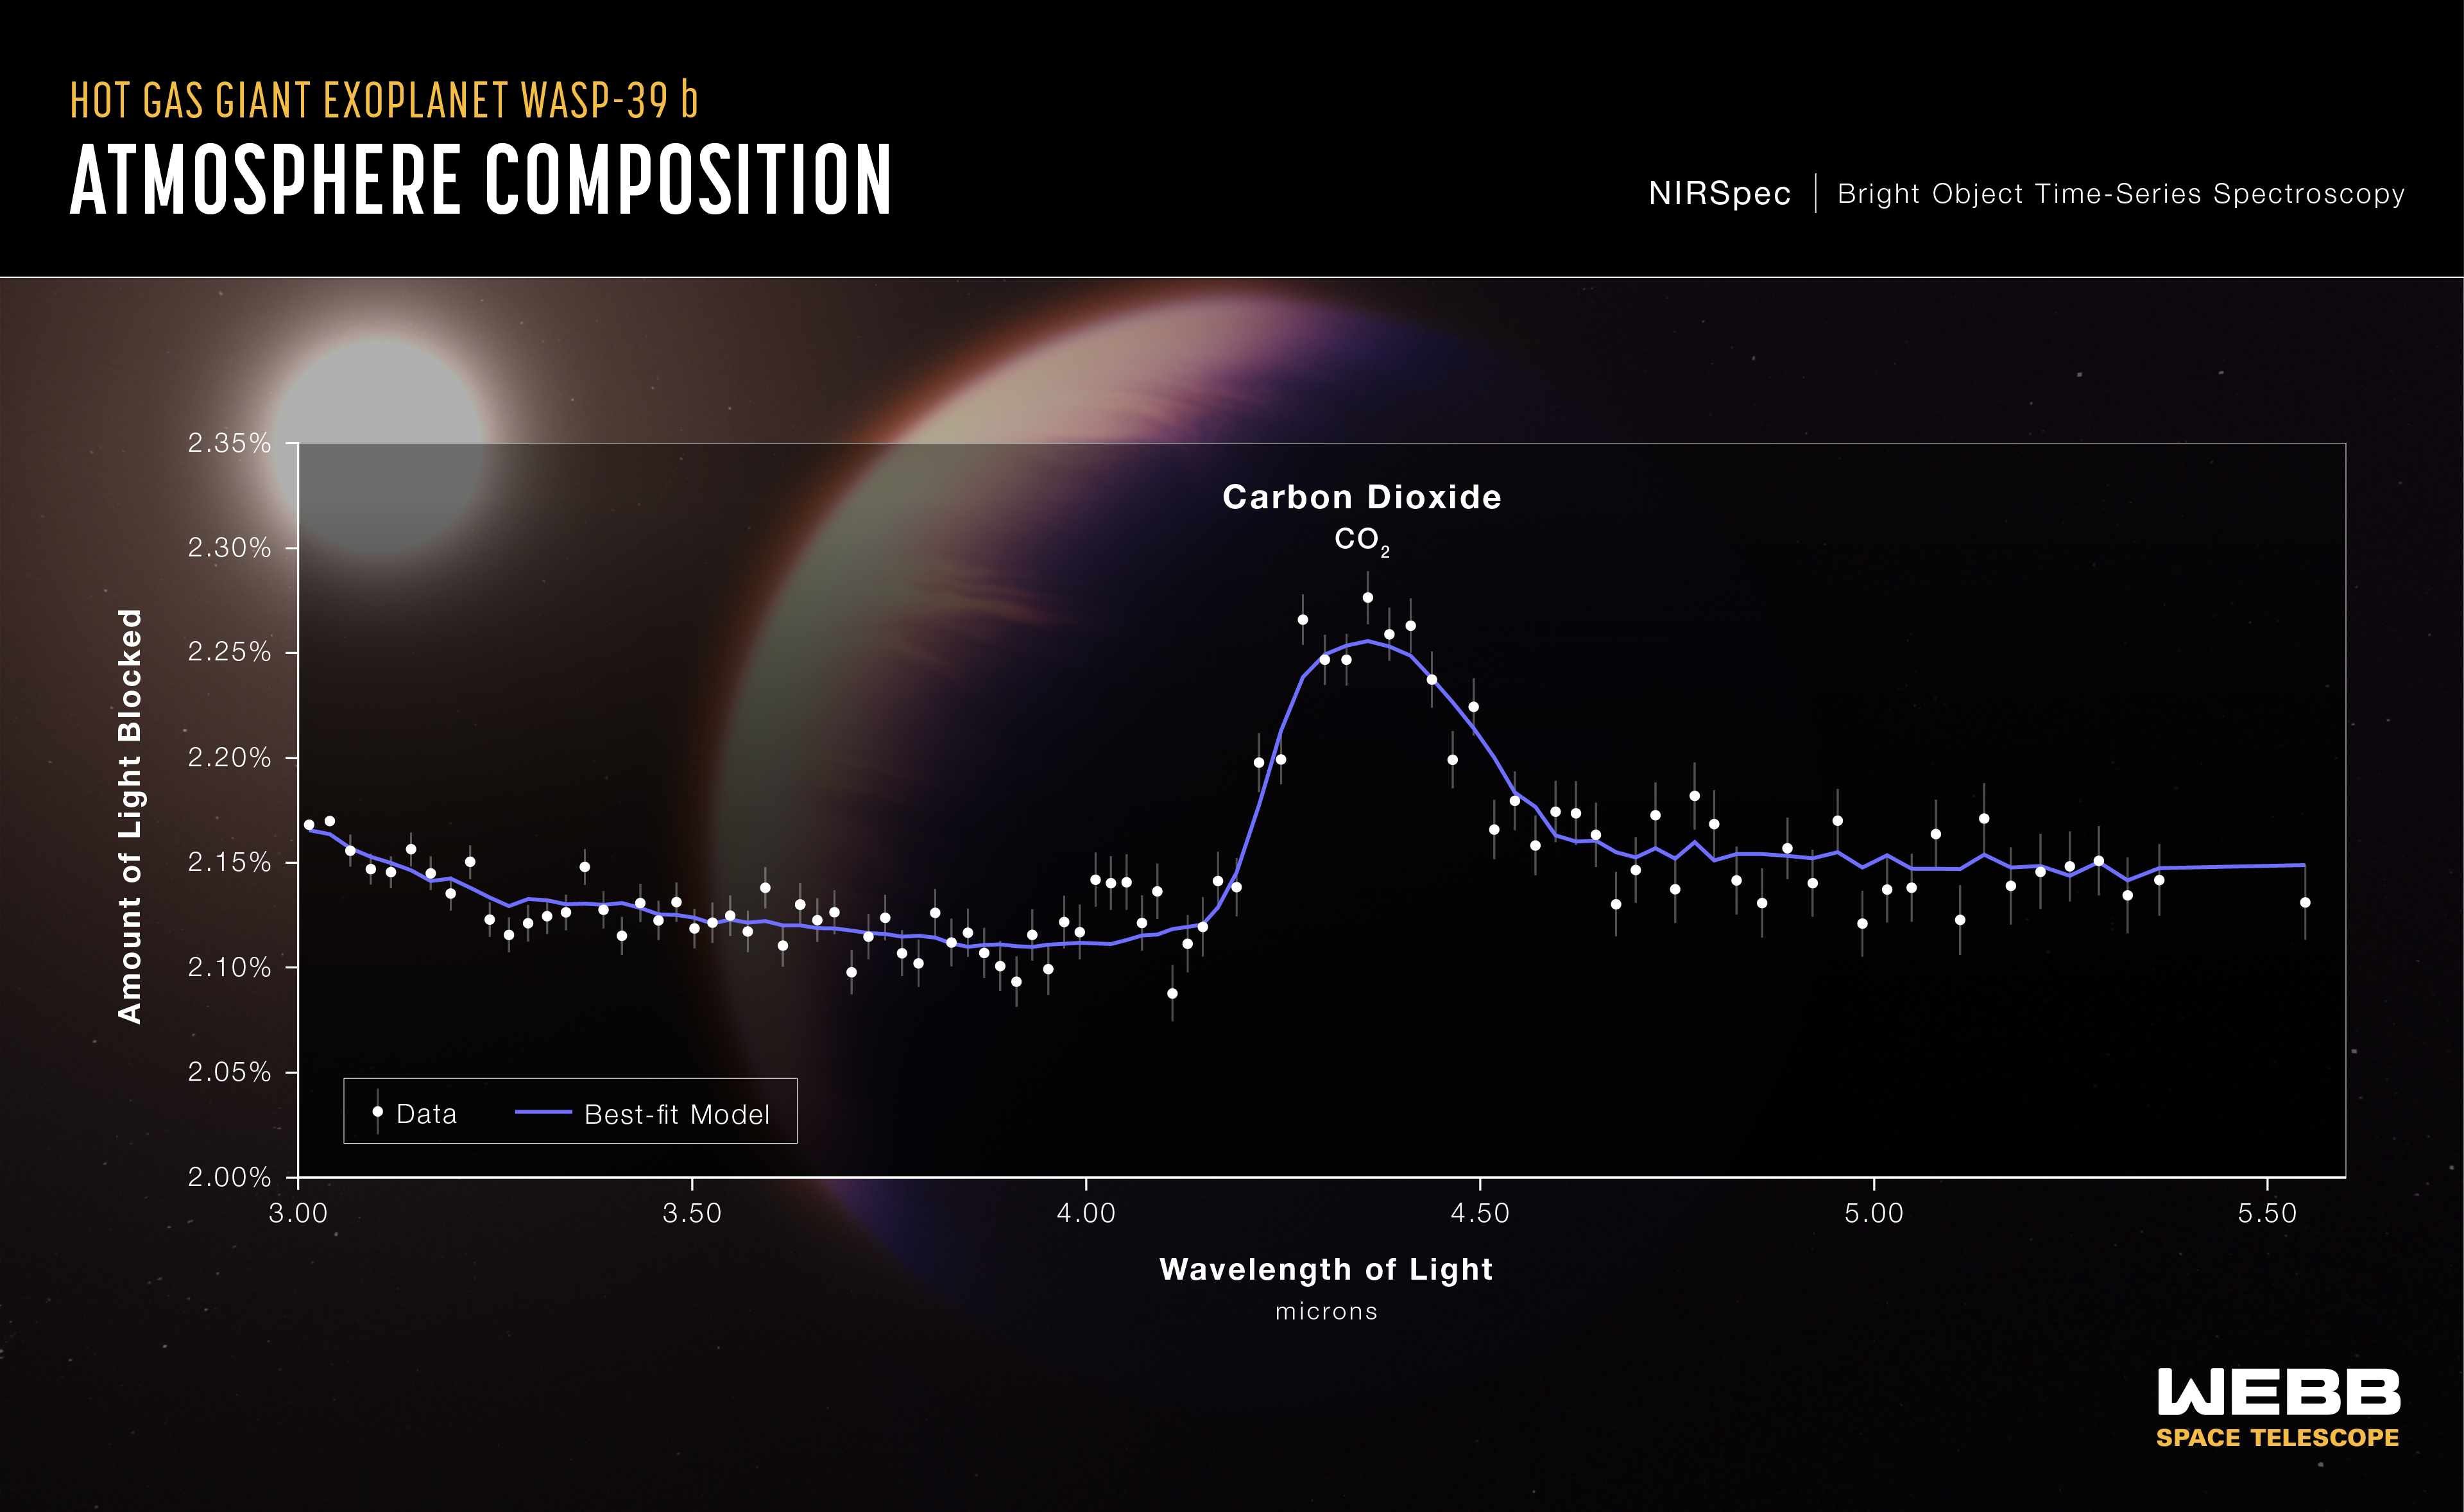

Hot Gas Giant Exoplanet WASP-39 b (NIRSpec Transmission Spectrum)

A transmission spectrum of the hot gas giant exoplanet WASP-39 b, captured by Webb’s Near-Infrared Spectrograph (NIRSpec) on 10 July 10 2022, reveals the first definitive evidence for carbon dioxide in the atmosphere of a planet outside the Solar System. This is the first detailed transmission spectrum ever captured that covers wavelengths between 3 and 5.5 microns.

A transmission spectrum is made by comparing starlight filtered through a planet’s atmosphere as it moves in front of the star, to the unfiltered starlight detected when the planet is beside the star. Each of the 95 data points (white circles) on this graph represents the amount of a specific wavelength of light that is blocked by the planet and absorbed by its atmosphere.

This spectrum was made by measuring the change in brightness of each wavelength over time as the planet transited its star. The planet’s atmosphere absorbs some wavelengths more than others. Wavelengths absorbed by the atmosphere appear as peaks in the transmission spectrum. The hill centred around 4.3 microns represents the light absorbed by carbon dioxide.

The grey lines extending above and below each data point are error bars that show the uncertainty of each measurement, or the reasonable range of possible values. For a single observation, the error on these measurements is extremely small.

The blue line is a best-fit model that takes into account the data, the known properties of WASP-39 b and its star (e.g., size, mass, temperature), and the assumed characteristics of the atmosphere. Researchers can vary the parameters in the model — changing unknown characteristics like cloud height in the atmosphere and abundances of various gases — to get a better fit and further understand what the atmosphere is really like. The model shown here assumes that the planet is made primarily of hydrogen and helium with small amounts of water and carbon dioxide, with a thin veil of clouds.

The observation was made using the NIRSpec PRISM bright object time-series mode, which involves using a prism to spread out light from a single bright object (like the star WASP-39) and measuring the brightness of each wavelength at set intervals of time.

WASP-39 b is a hot gas giant exoplanet that orbits a Sun-like star roughly 700 light-years away, in the constellation Virgo. The planet orbits extremely close to its star (less than 1/20 of the distance between Earth and the Sun) and completes one orbit in just over four Earth-days. The planet’s discovery, based on ground-based observations, was announced in 2011. The star, WASP-39, is roughly the same size, mass, temperature, and colour as the Sun.

The background illustration of WASP-39 b and its star is based on current understanding of the planet from Webb spectroscopy and previous ground- and space-based observations. Webb has not captured a direct image of the planet or its atmosphere.

NIRSpec was built for the European Space Agency (ESA) by a consortium of European companies led by Airbus Defence and Space (ADS) with NASA’s Goddard Space Flight Centre providing its detector and micro-shutter subsystems.

Credit: NASA, ESA, CSA, and L. Hustak (STScI). Science: The JWST Transiting Exoplanet Community Early Release Science Team